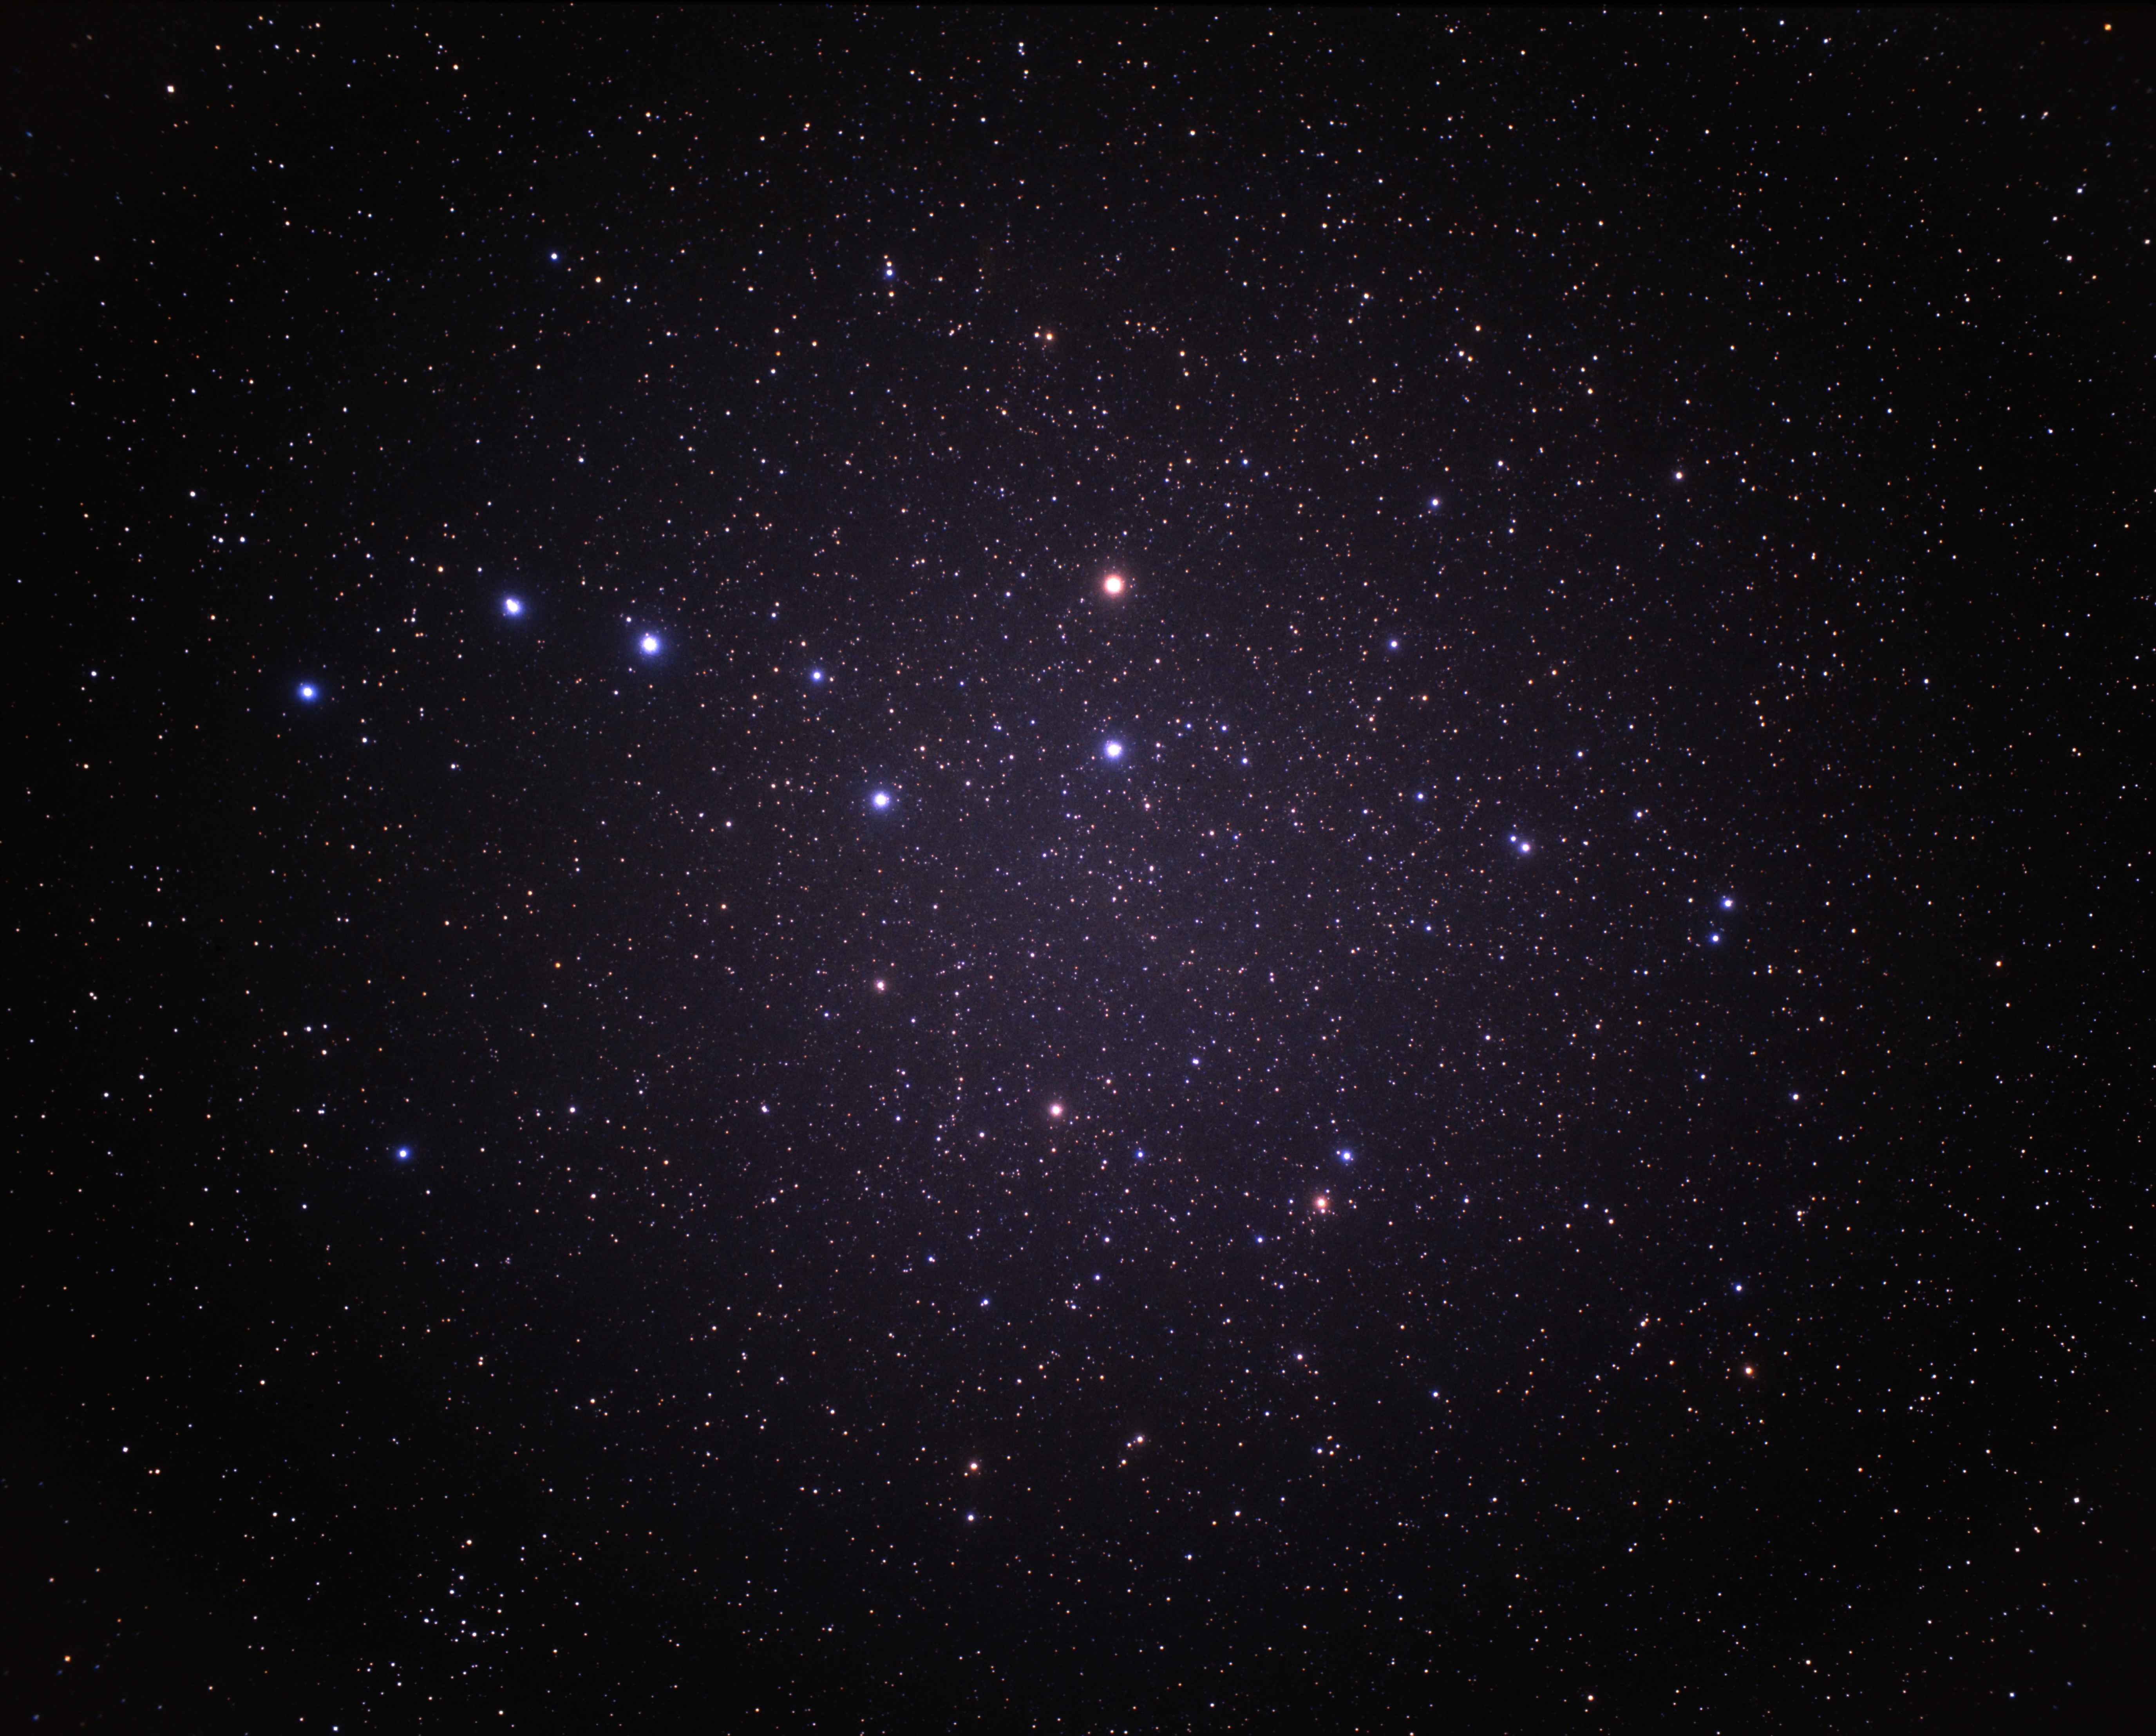

Coma Cluster wide-field (ground-based image)

In this ground-based image the constellation Coma Berenices is on the lower left.

Credit: A. Fujii